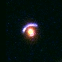

Hubble's Top Ten Gravitational Lenses. A View of HST 15433+5352

HST 15433+5352 is a very good lens candidate with a bluer lensed source in the form of an extended arc about the redder elliptical lensing galaxy.

Credit: Kavan Ratnatunga (Carnegie Mellon Univ.) and NASA/ESA